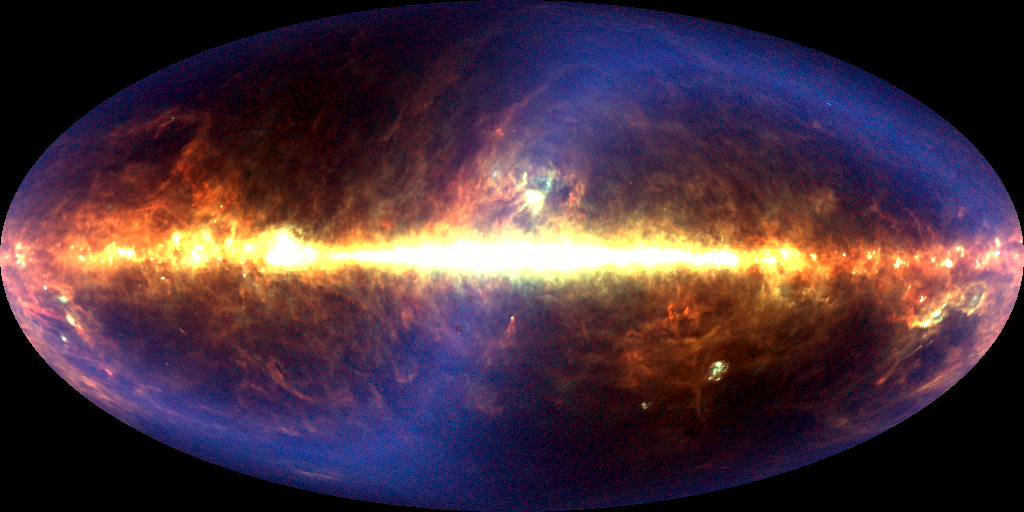

DIRBE 60 micrometer image of sky

Astronomers have assembled the first definitive detection of a background infrared glow across the sky produced by dust warmed by all the stars that have existed since the beginning of time. For scientists, the discovery of this "fossil radiation" is akin to turning out all the lights in a bedroom only to find the walls, floor, and ceiling aglow with an eerie luminescence.

Credit: Michael Hauser (STScI), the COBE/DIRBE Science Team, and NASA/ESA